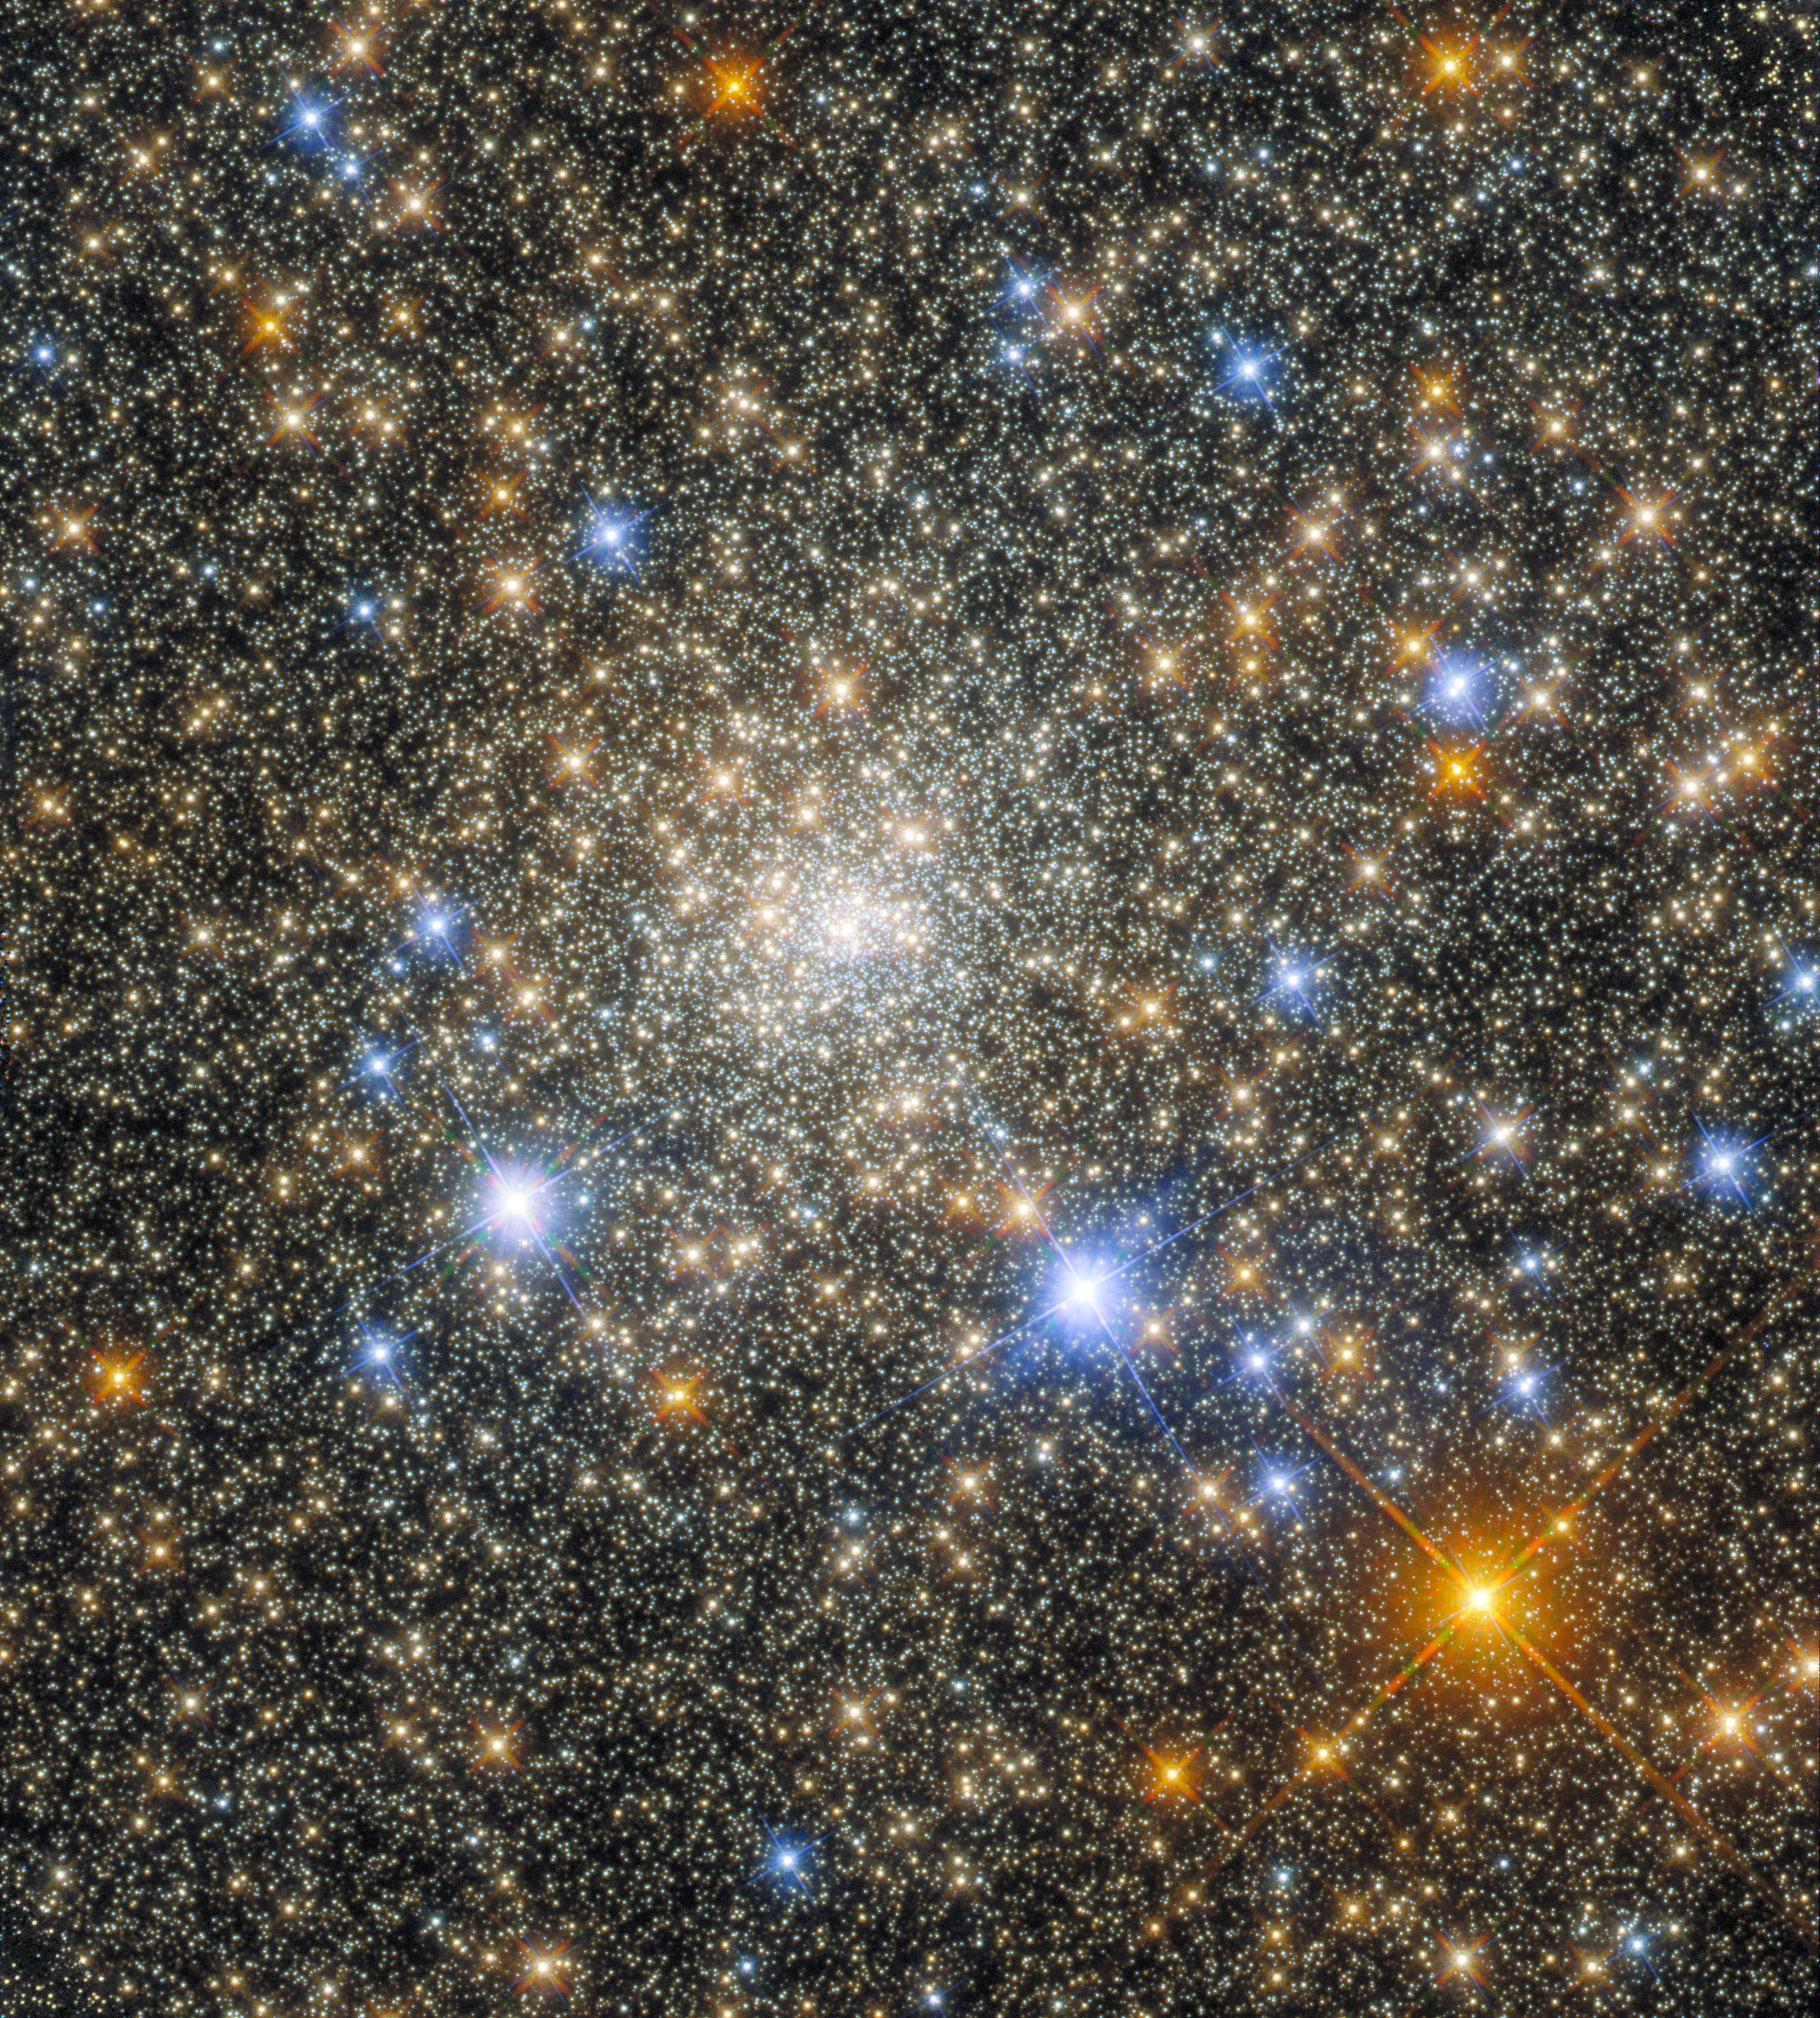

Portrait of a Globular Cluster

The globular cluster Terzan 2 in the constellation Scorpio features in this observation from the NASA/ESA Hubble Space Telescope. Globular clusters are stable, tightly gravitationally bound clusters of tens of thousands to millions of stars found in a wide variety of galaxies. The intense gravitational attraction between the closely packed stars gives globular clusters a regular, spherical shape. As a result, images of the hearts of globular clusters, such as this observation of Terzan 2, are crowded with a multitude of glittering stars.

Hubble used both its Advanced Camera for Surveys and its Wide Field Camera 3 in this observation, taking advantage of the complementary capabilities of these instruments. Despite having only one primary mirror, Hubble’s design allows multiple instruments to be used to inspect astronomical objects. Light from distant astronomical objects enters Hubble and is collected by the telescope's 2.4-metre primary mirror; it is then reflected off the secondary mirror into the depths of the telescope, where smaller mirrors can direct light into individual instruments.

Each of the four operational instruments on Hubble is a masterpiece of astronomical engineering in its own right, and contains an intricate array of mirrors and other optical elements to remove any aberrations or optical imperfections from observations, as well as filters which allow astronomers to observe specific wavelength ranges. The mirrors inside each instrument also correct for the slight imperfection of Hubble's primary mirror. The end result is a crystal-clear observation, such as this glittering portrait of Terzan 2.

Credit: ESA/Hubble & NASA, R. Cohen